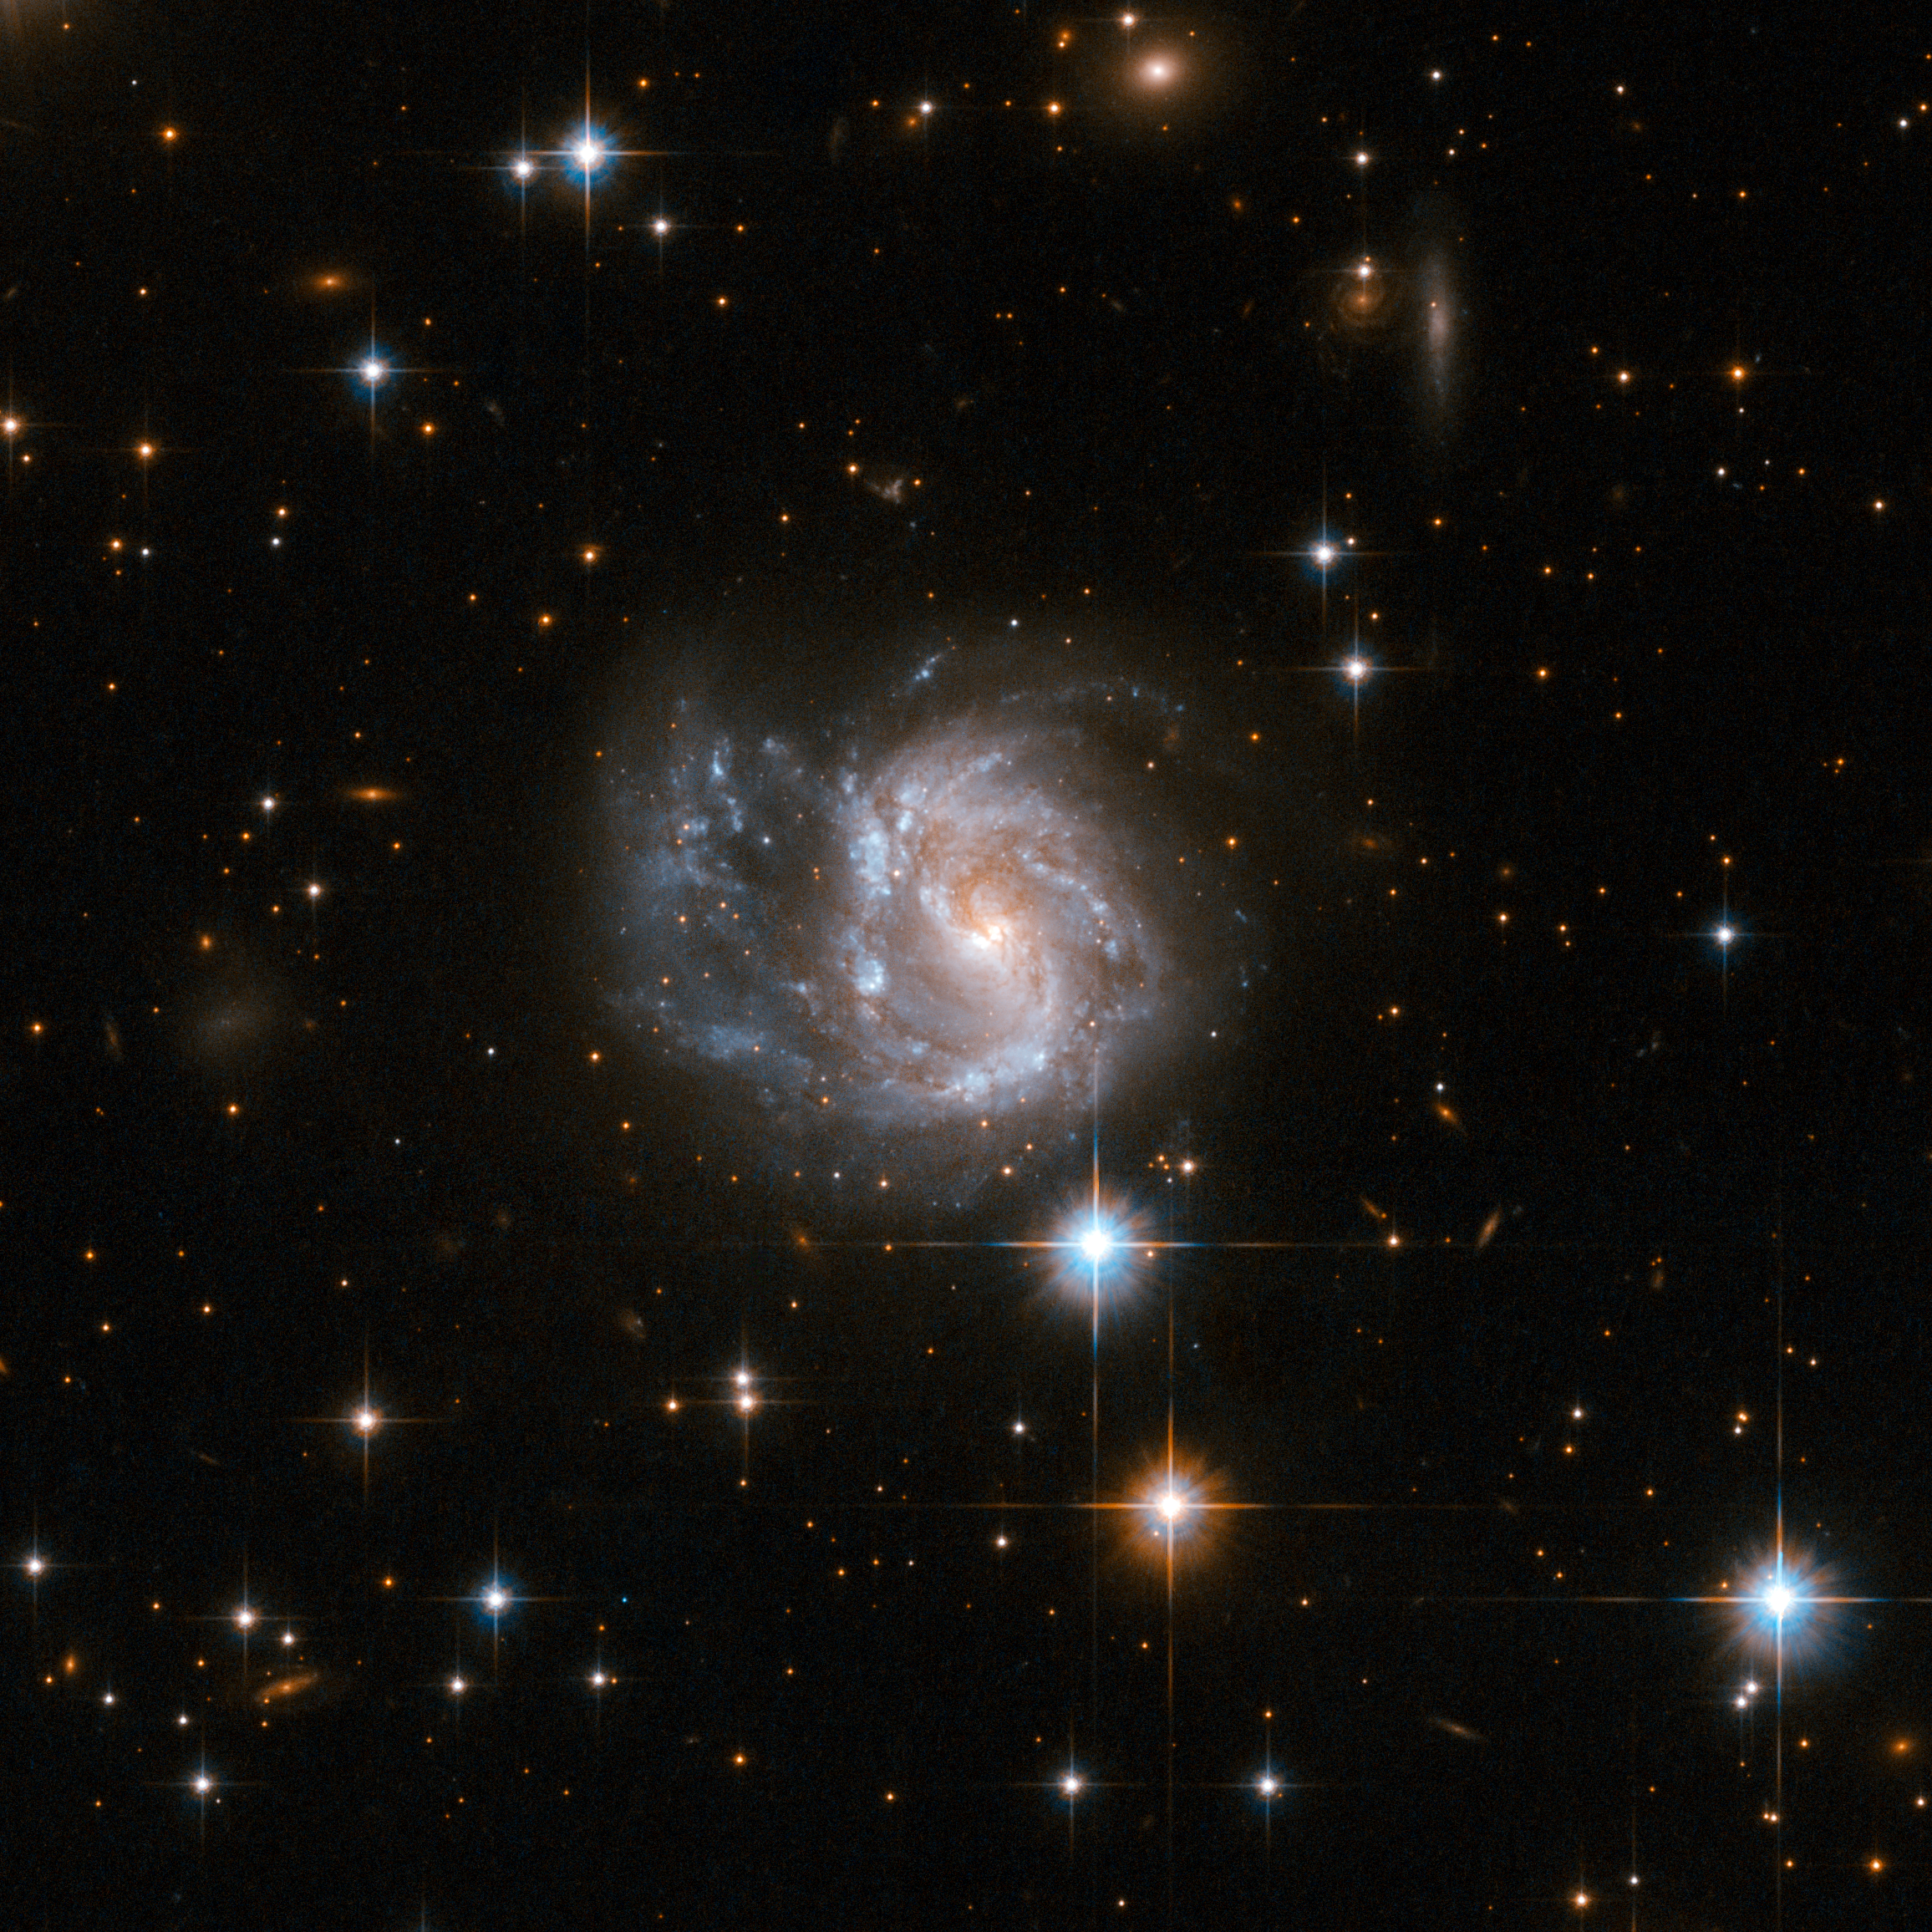

IRAS 20351+2521

IRAS 20351+2521 is a galaxy with a sprawling structure of gas, dust and numerous blue star knots. IRAS 20351+2521 is located in the constellation of Vulpecula, the Fox, 450 million light-years away from Earth.

This image is part of a large collection of 59 images of merging galaxies taken by the Hubble Space Telescope and released on the occasion of its 18th anniversary on 24th April 2008.

Credit: NASA, ESA, the Hubble Heritage Team (STScI/AURA)-ESA/Hubble Collaboration and A. Evans (University of Virginia, Charlottesville/NRAO/Stony Brook University)